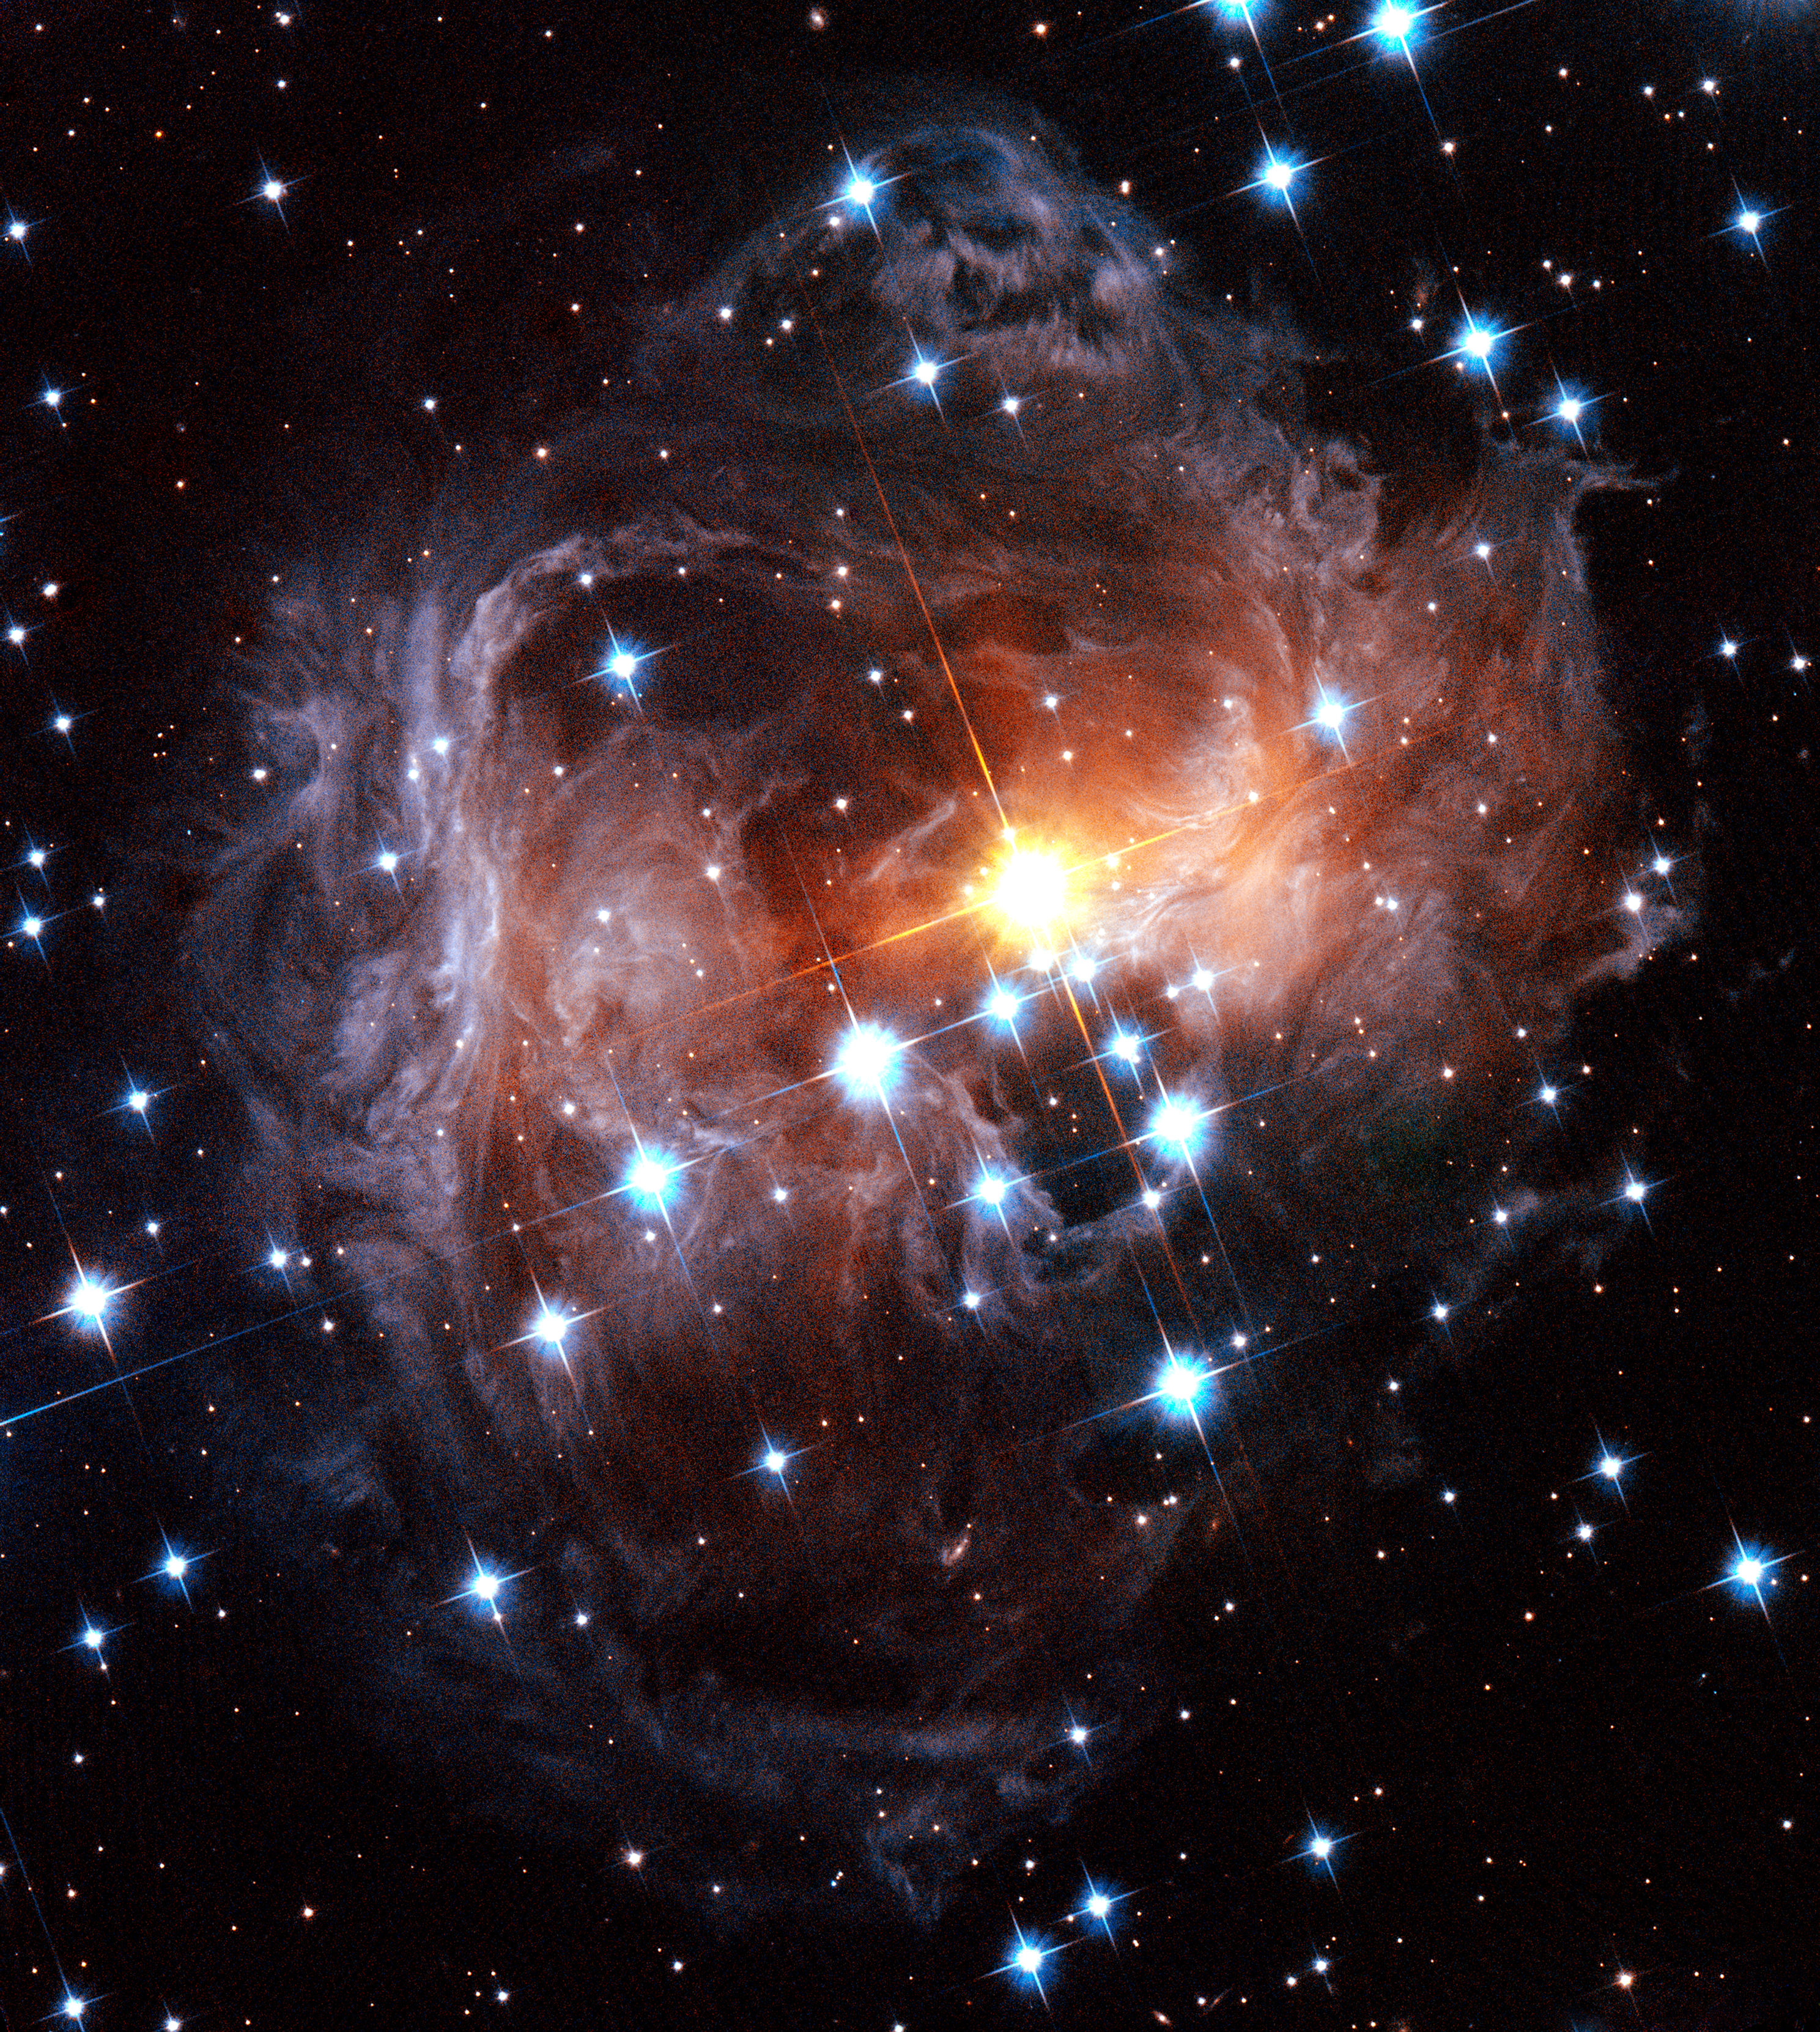

Spectacular view of V838 Monocerotis light echo

The light echo around the star V838 Monocerotis as seen by the Hubble Space Telescope in November 2005.

Credit: NASA, ESA and H. Bond (STScI)